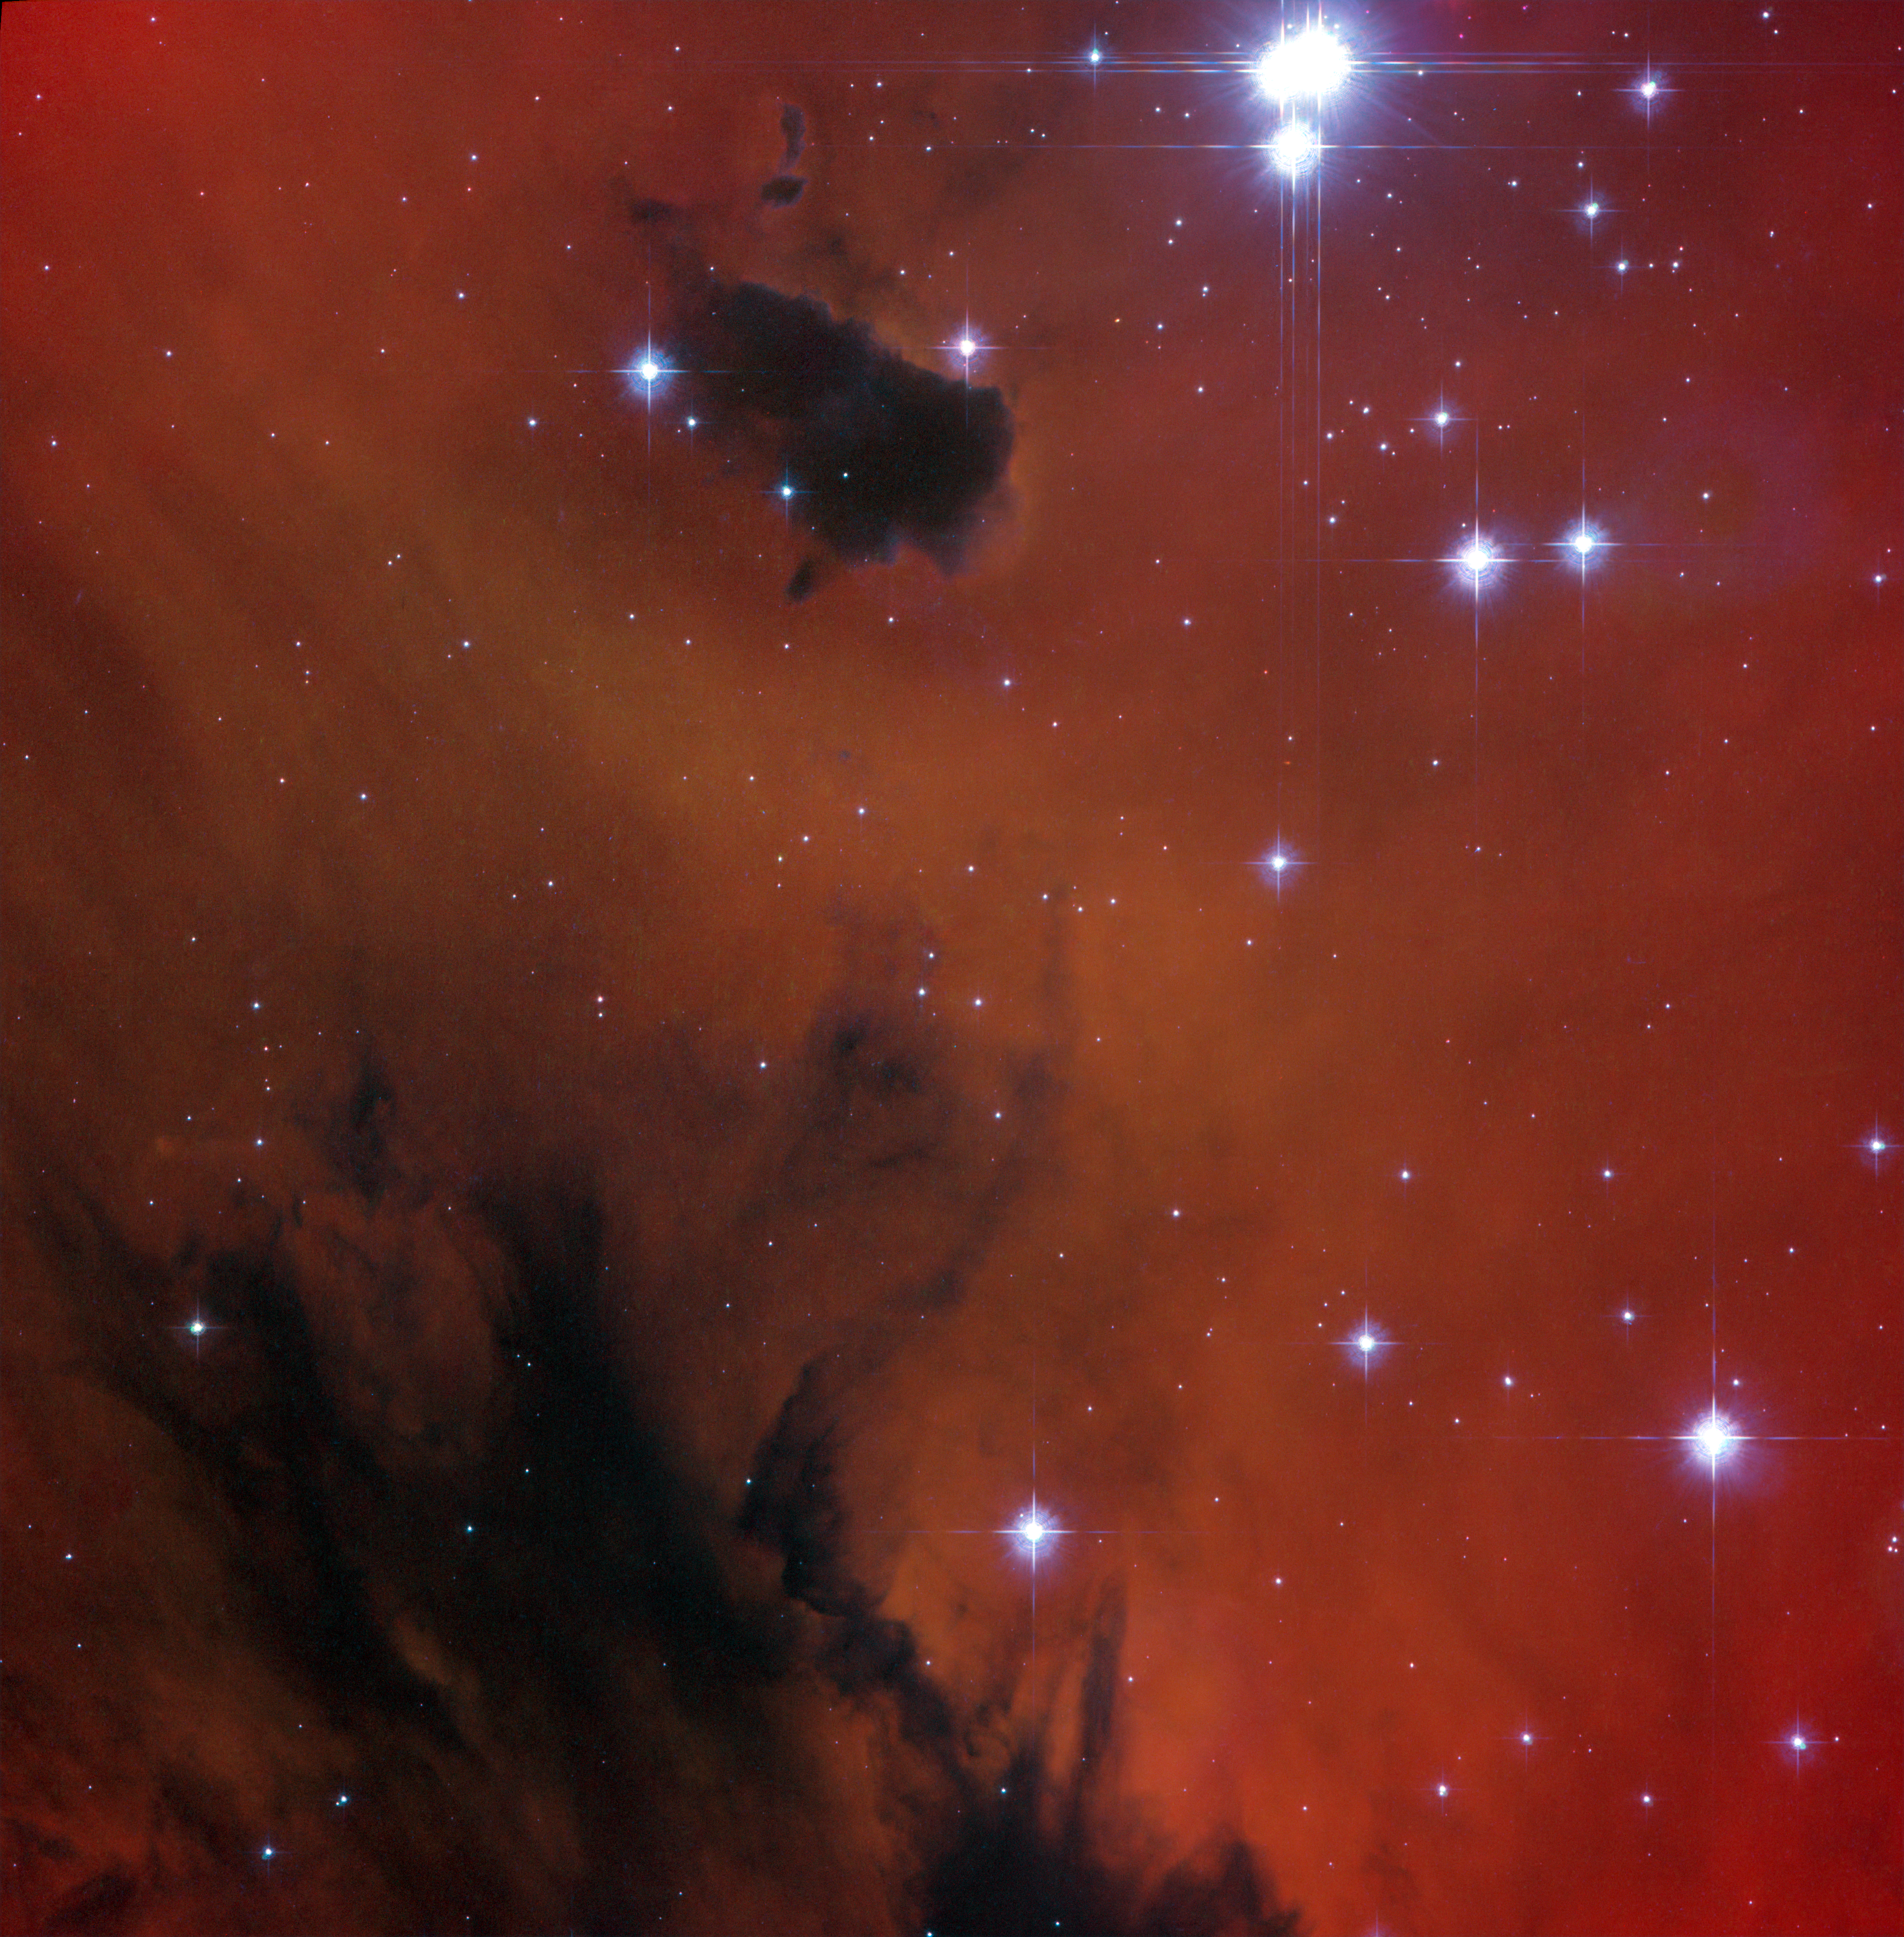

Arcade adventure for young stars

Astronomers have used the NASA/ESA Hubble Space Telescope to study the young open star cluster IC 1590, which is found within the star formation region NGC 281 — nicknamed the Pacman Nebula due to its resemblance to the famous arcade game character. This image only shows the central part of the nebula, where the brightest stars at the core of the cluster are found, with part of the Pacman’s hungry mouth visible as the dark region below.

But Pacman isn’t gobbling up these stars. Instead, the nebula’s gas and dust are being used as raw ingredients to make new stars. However, the stars in IC 1590 are still plotting their escape from the Pacman Nebula, as open clusters are only loosely bound together and the grouping will eventually disperse within a few tens of millions of years.

IC 1590 lies about ten thousand light-years from Earth in the constellation of Cassiopeia (The Queen). Through small telescopes the core of the cluster that appears at the top of this picture shows up as a triple star, but the nebula that surrounds it is much fainter and very hard to see. The eagle-eyed American astronomer E. E. Barnard, using a 15 cm telescope, first recorded it in the late nineteenth century.

This picture was created from images taken using the Wide Field Channel of Hubble’s Advanced Camera for Surveys. Images though yellow (F550M, coloured blue), orange (F660N, coloured green) and red (F658N) filters were combined. The F658N filter isolates light from glowing hydrogen gas. The total exposure times per filter were 450 s, 1017 s and 678 s, respectively and the field of view is about 3.3 arcminutes across.

Credit: ESA/Hubble & NASA